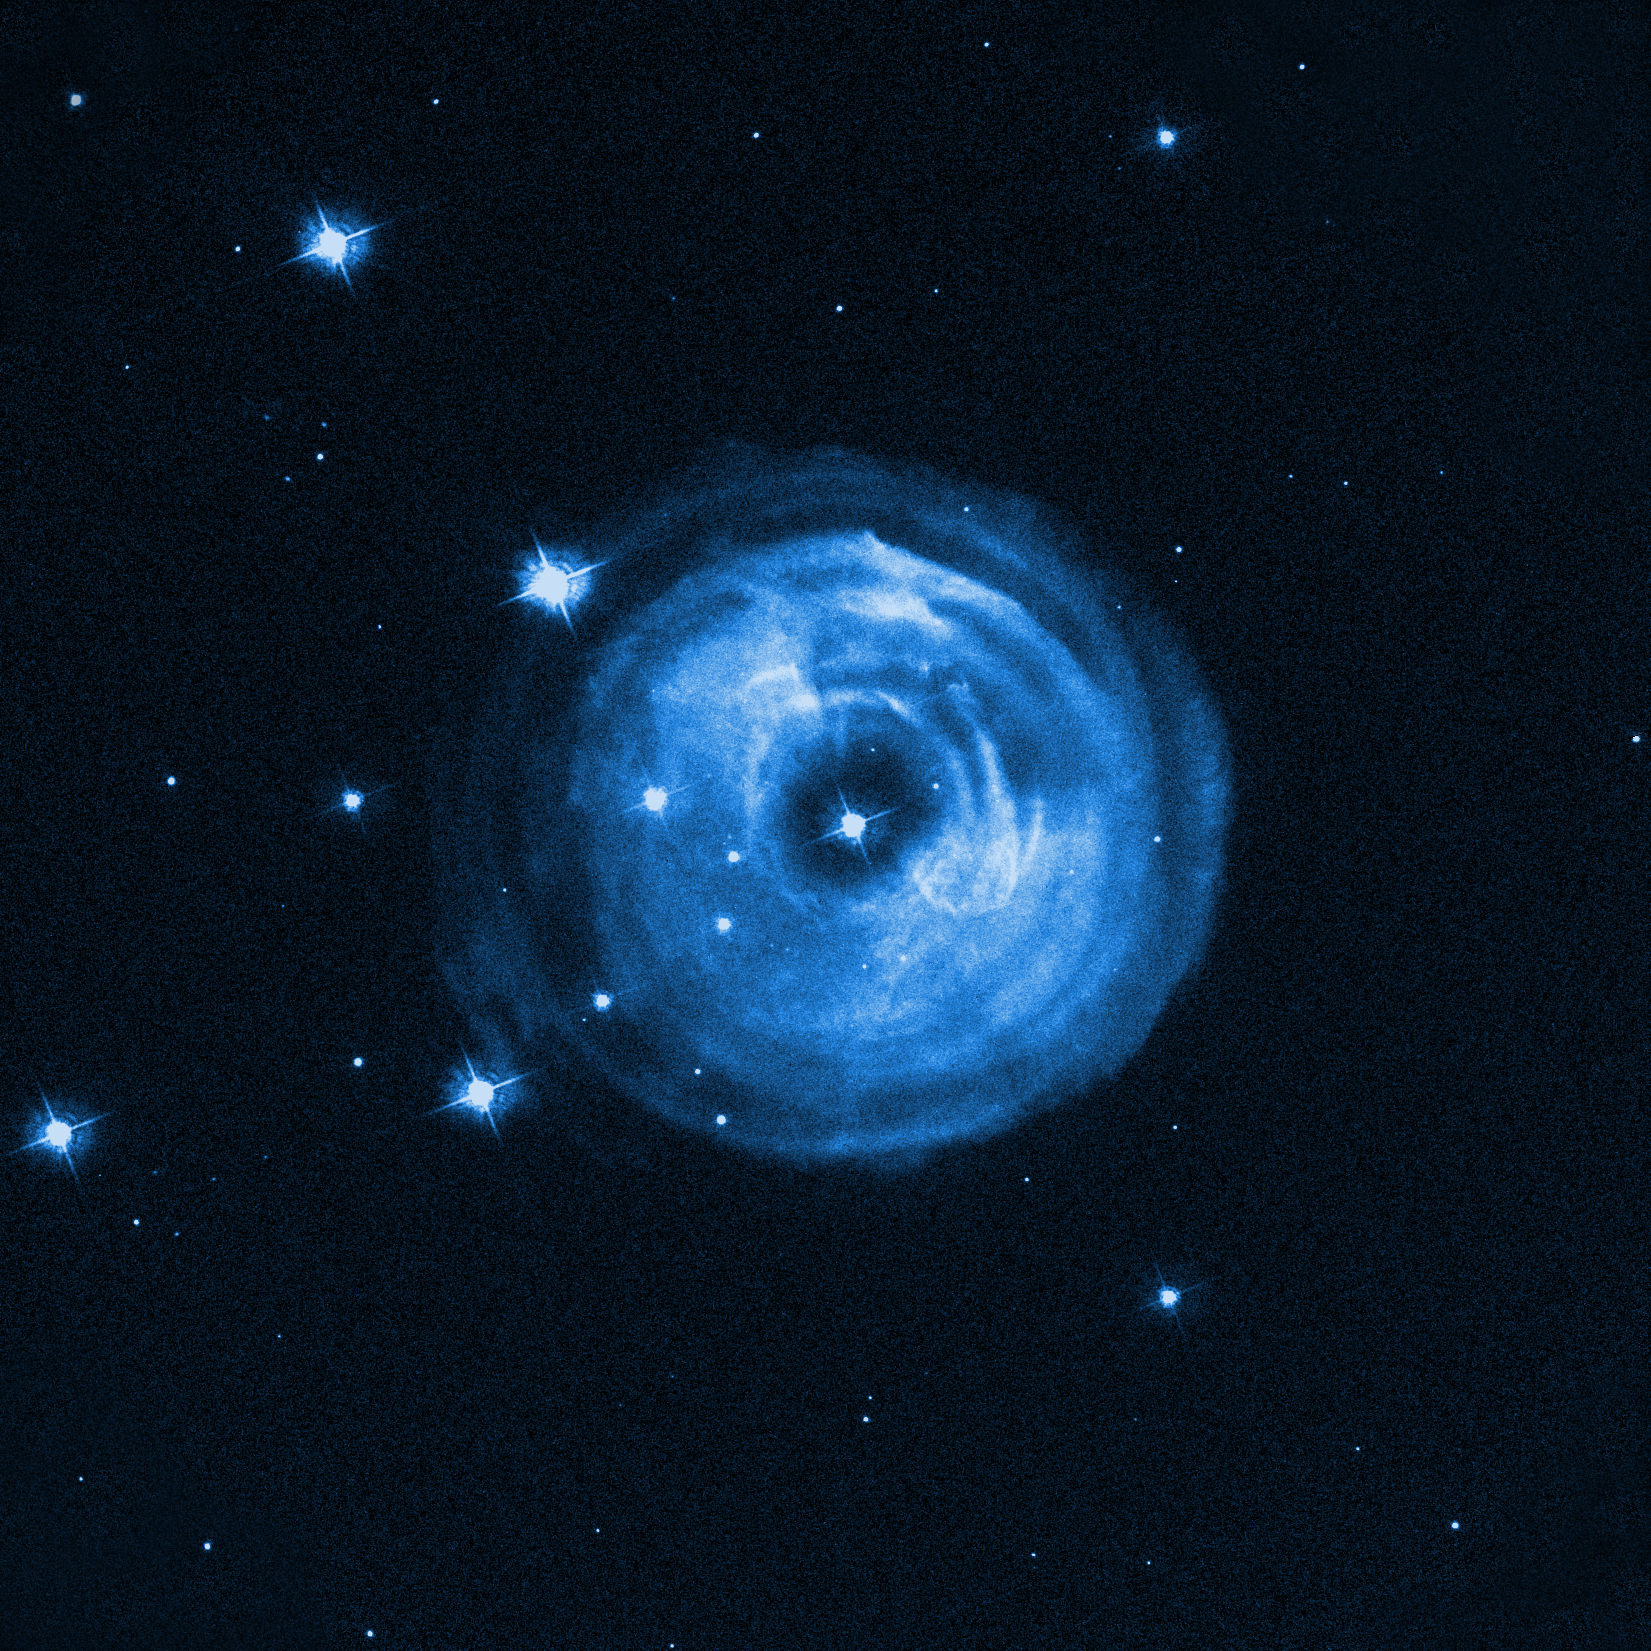

V838 Monocerotis in April 2002

Image showing star V838 Monocerotis in April 30, 2002, after the outburst.

Credit: NASA, ESA and H. E. Bond (STScI).